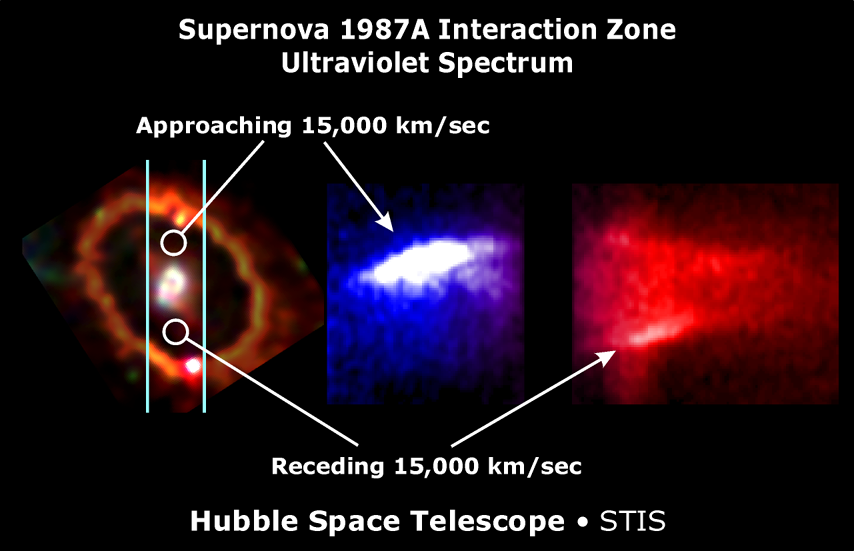

STIS spectrum showing Interaction regions

SN 1987A was a supernova within the Large Magellanic Cloud, a companion dwarf galaxy of the Milky Way. Observations made several months after the supernova showed a ring surrounding the remnants of the progenitor stars. This ring consists of material from the stellar wind of the star which was ionized by the explosion of the supernova. In 2001 the expanding material from the supernova collided with this ionized gas, whereby the material was heated up.

Credit: P. Garnavich & R. Kirshner (CfA)